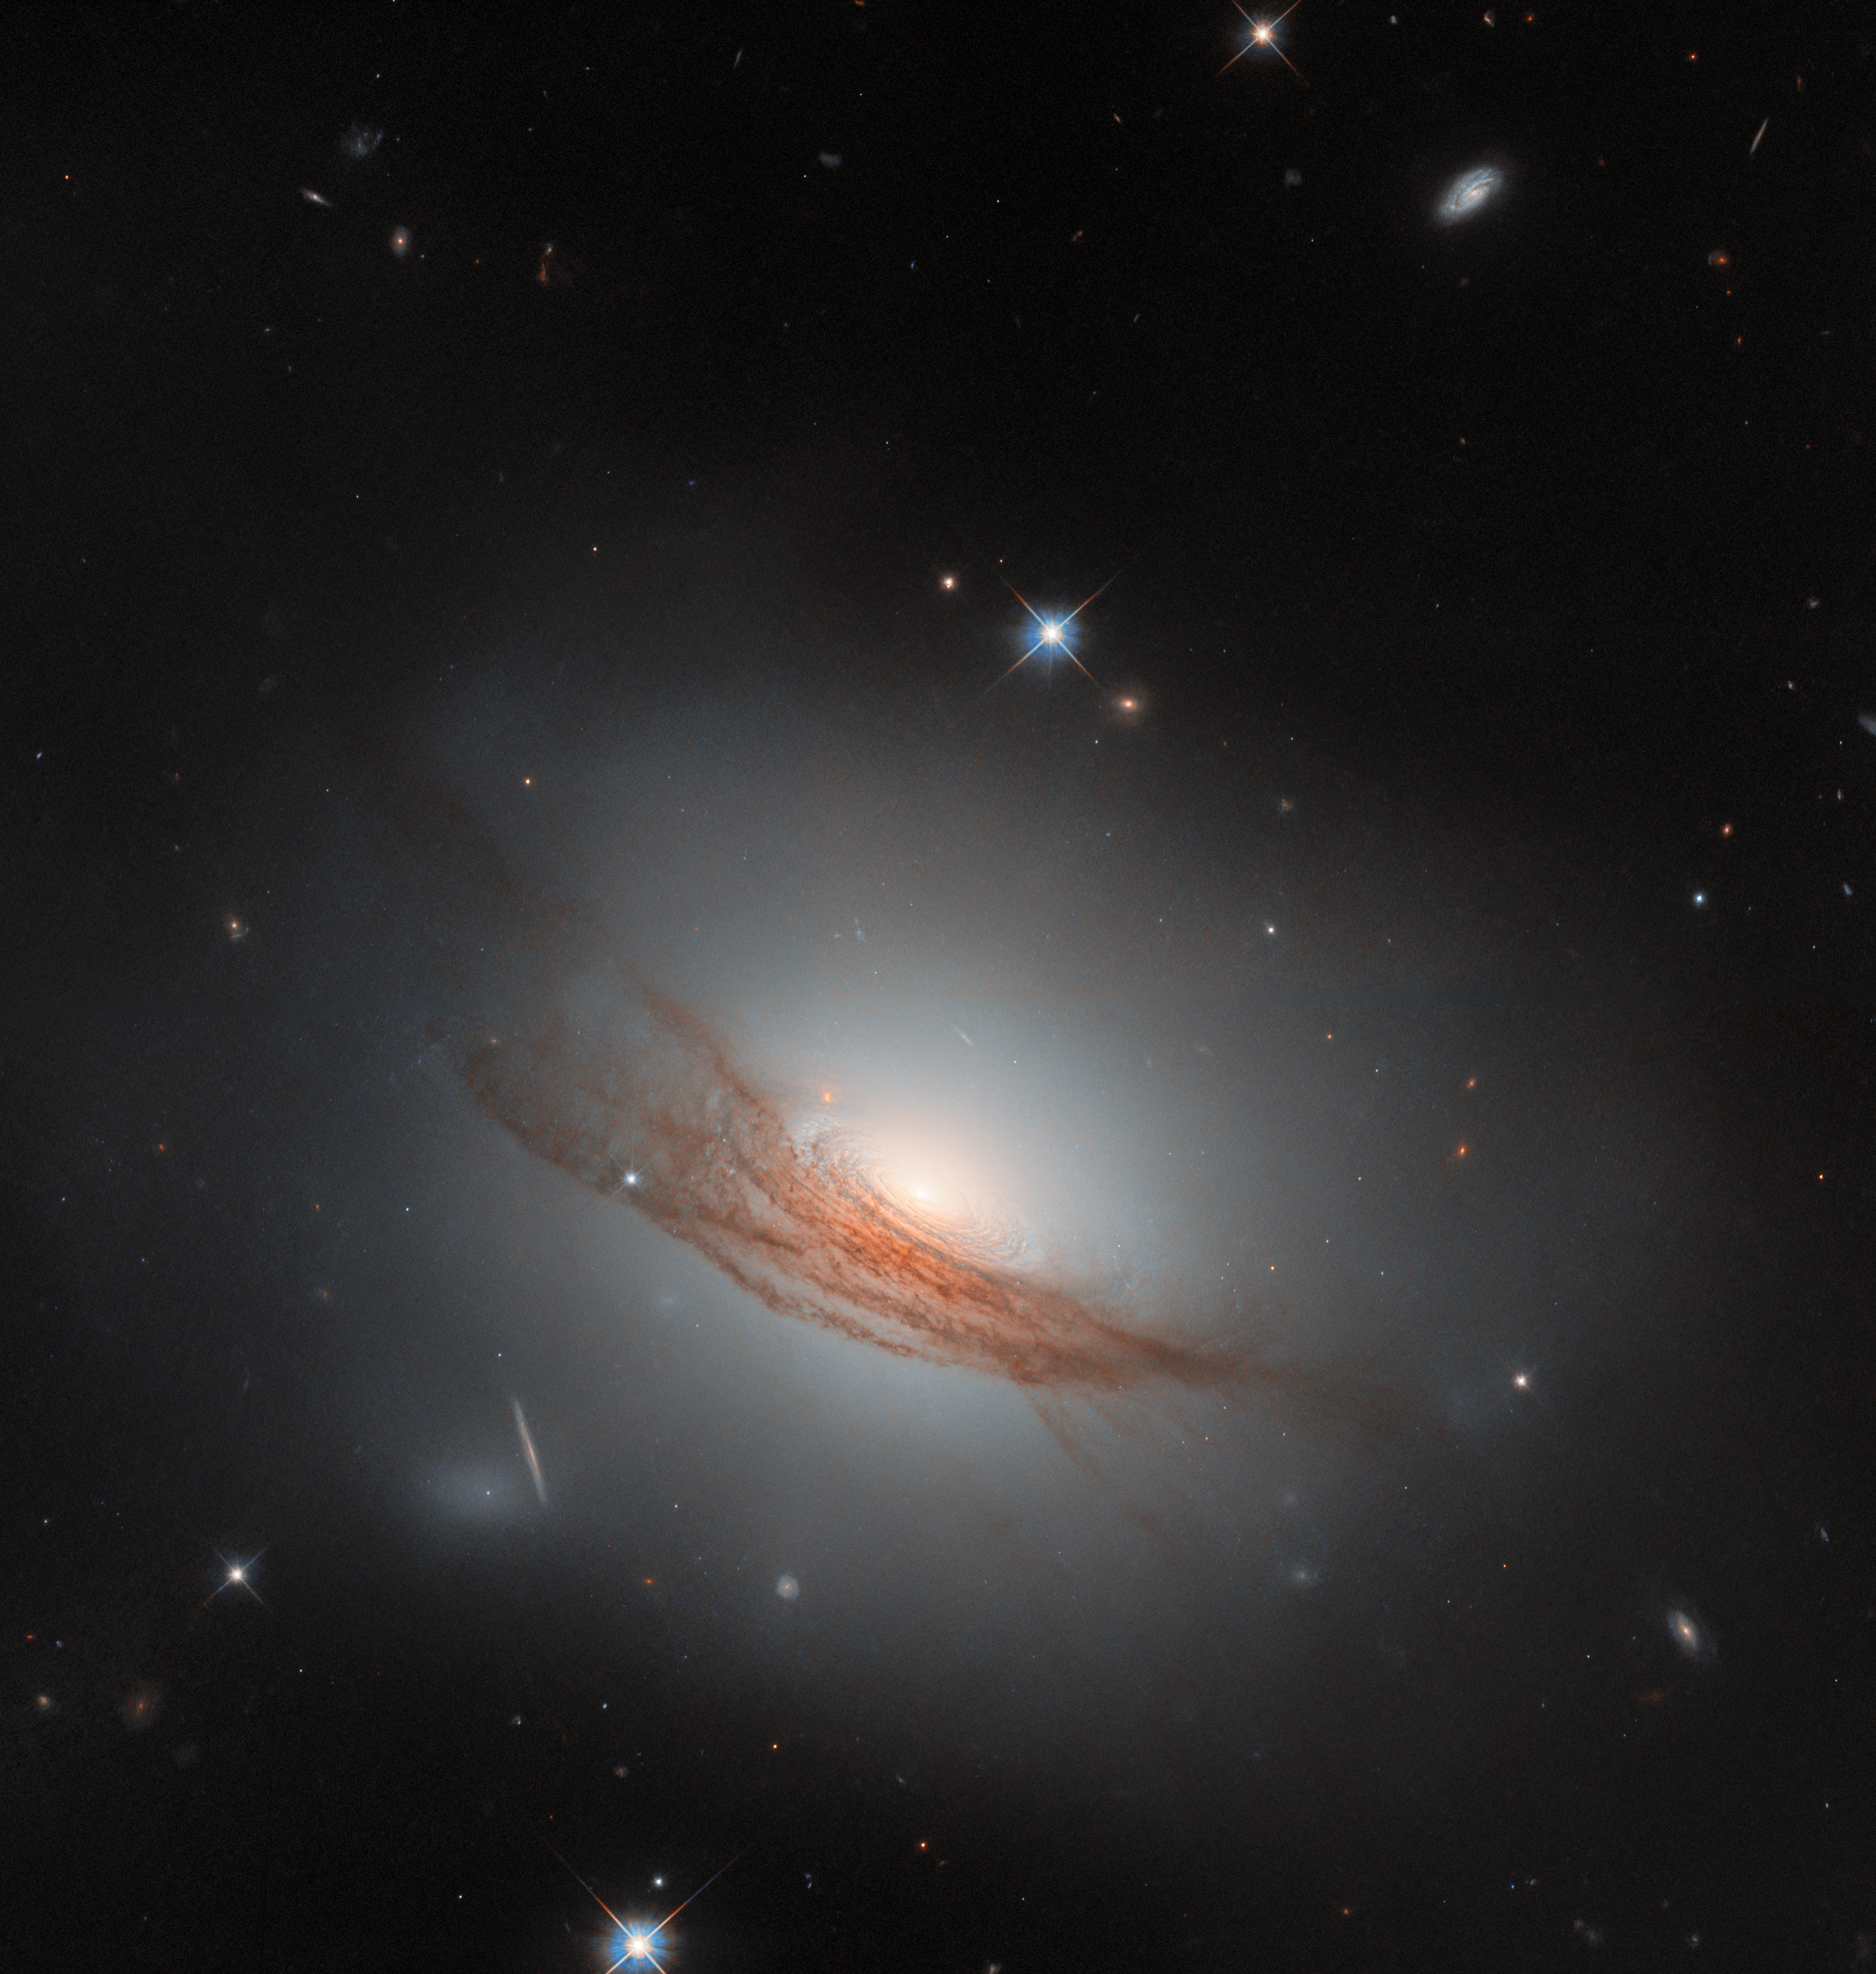

NGC 7722 in dark surroundings (wide crop)

For this Picture of the Month from the NASA/ESA Hubble Space Telescope, we have a sight of an uncommon galaxy with a striking appearance. This is NGC 7722, a lenticular galaxy located about 187 million light-years away in the constellation Pegasus.

A “lenticular”, meaning “lens-shaped”, galaxy is a type that sits in between the more familiar spiral galaxies and elliptical galaxies. It is also less common than these — partly because when a galaxy has an ambiguous appearance, it can be hard to determine if it is actually a spiral, actually an elliptical galaxy, or something in between. Many of the known lenticular galaxies sport features of both spiral and elliptical galaxies. In this case, NGC 7722 lacks the defined arms of a spiral galaxy, while it has an extended, glowing halo and a bright bulge in the centre similar to an elliptical galaxy. Unlike elliptical galaxies, it has a visible disc — concentric rings swirl around its bright nucleus. Its most prominent feature, however, is undoubtedly the long lanes of dark red dust coiling around the outer disc and halo.

This new Hubble image, the sharpest yet taken of NGC 7722, brings the impressive dust lanes into sharp focus. Bands of dust like this are not uncommon in lenticular galaxies, and they stand out against the broad, smooth halo of light that typically surrounds lenticular galaxies. The distinctive dust lanes of NGC 7722 are thought to result from a merger with another galaxy in the past, similar to other lenticular galaxies. It is not yet fully understood how lenticular galaxies form, but mergers and other gravitational interactions are thought to play an important part, reshaping galaxies and exhausting their supplies of gas while bringing new dust.

While it doesn’t host as many new, young stars as a spiral galaxy, there’s still activity in NGC 7722: in 2020 it was host to the explosion of a star that could be detected from Earth. SN 2020SSF was a Type Ia supernova, an event which occurs when a white dwarf star in a binary system siphons enough mass away from its companion star that it grows unstable and explodes. These explosions output a remarkably consistent level of light: by measuring how bright they appear from Earth and comparing against how bright they really are, it’s possible to tell how far away they must be. Type Ia supernovae are one of the best ways to measure distances to galaxies, so understanding exactly how they work is of great importance to astronomers.

Taken with Hubble’s Wide Field Camera 3, this Hubble image was obtained as part of an observing programme (#16691, PI: R. J. Foley) that followed up on recent supernovae. SN 2020SSF is not visible in this image, as it was actually taken two years later, when the supernova had long faded. This was on purpose: the aim of the observations was to witness the aftereffects of the supernova and examine its surroundings, which can only be done once the intense light of the explosion is gone. With Hubble’s clear vision, astronomers can search for radioactive material created by the supernova, catalogue its neighbours to see how old the star likely was, and look for the companion star it left behind — all from almost 200 million light-years away.

Credit: ESA/Hubble & NASA, R. J. Foley (UC Santa Cruz), Dark Energy Survey/DOE/FNAL/DECam/CTIO/NOIRLab/NSF/AURA Acknowledgement: Mehmet Yüksek